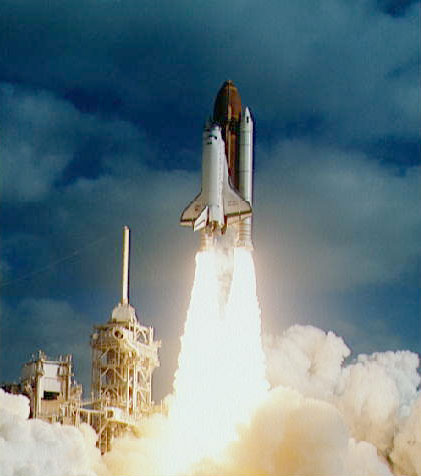

Launch of Space Shuttle for the deployment of the NASA/ESA Hubble Space Telescope

Launch of Space Shuttle for the deployment of the NASA/ESA Hubble Space Telescope

Credit: NASA & ESA